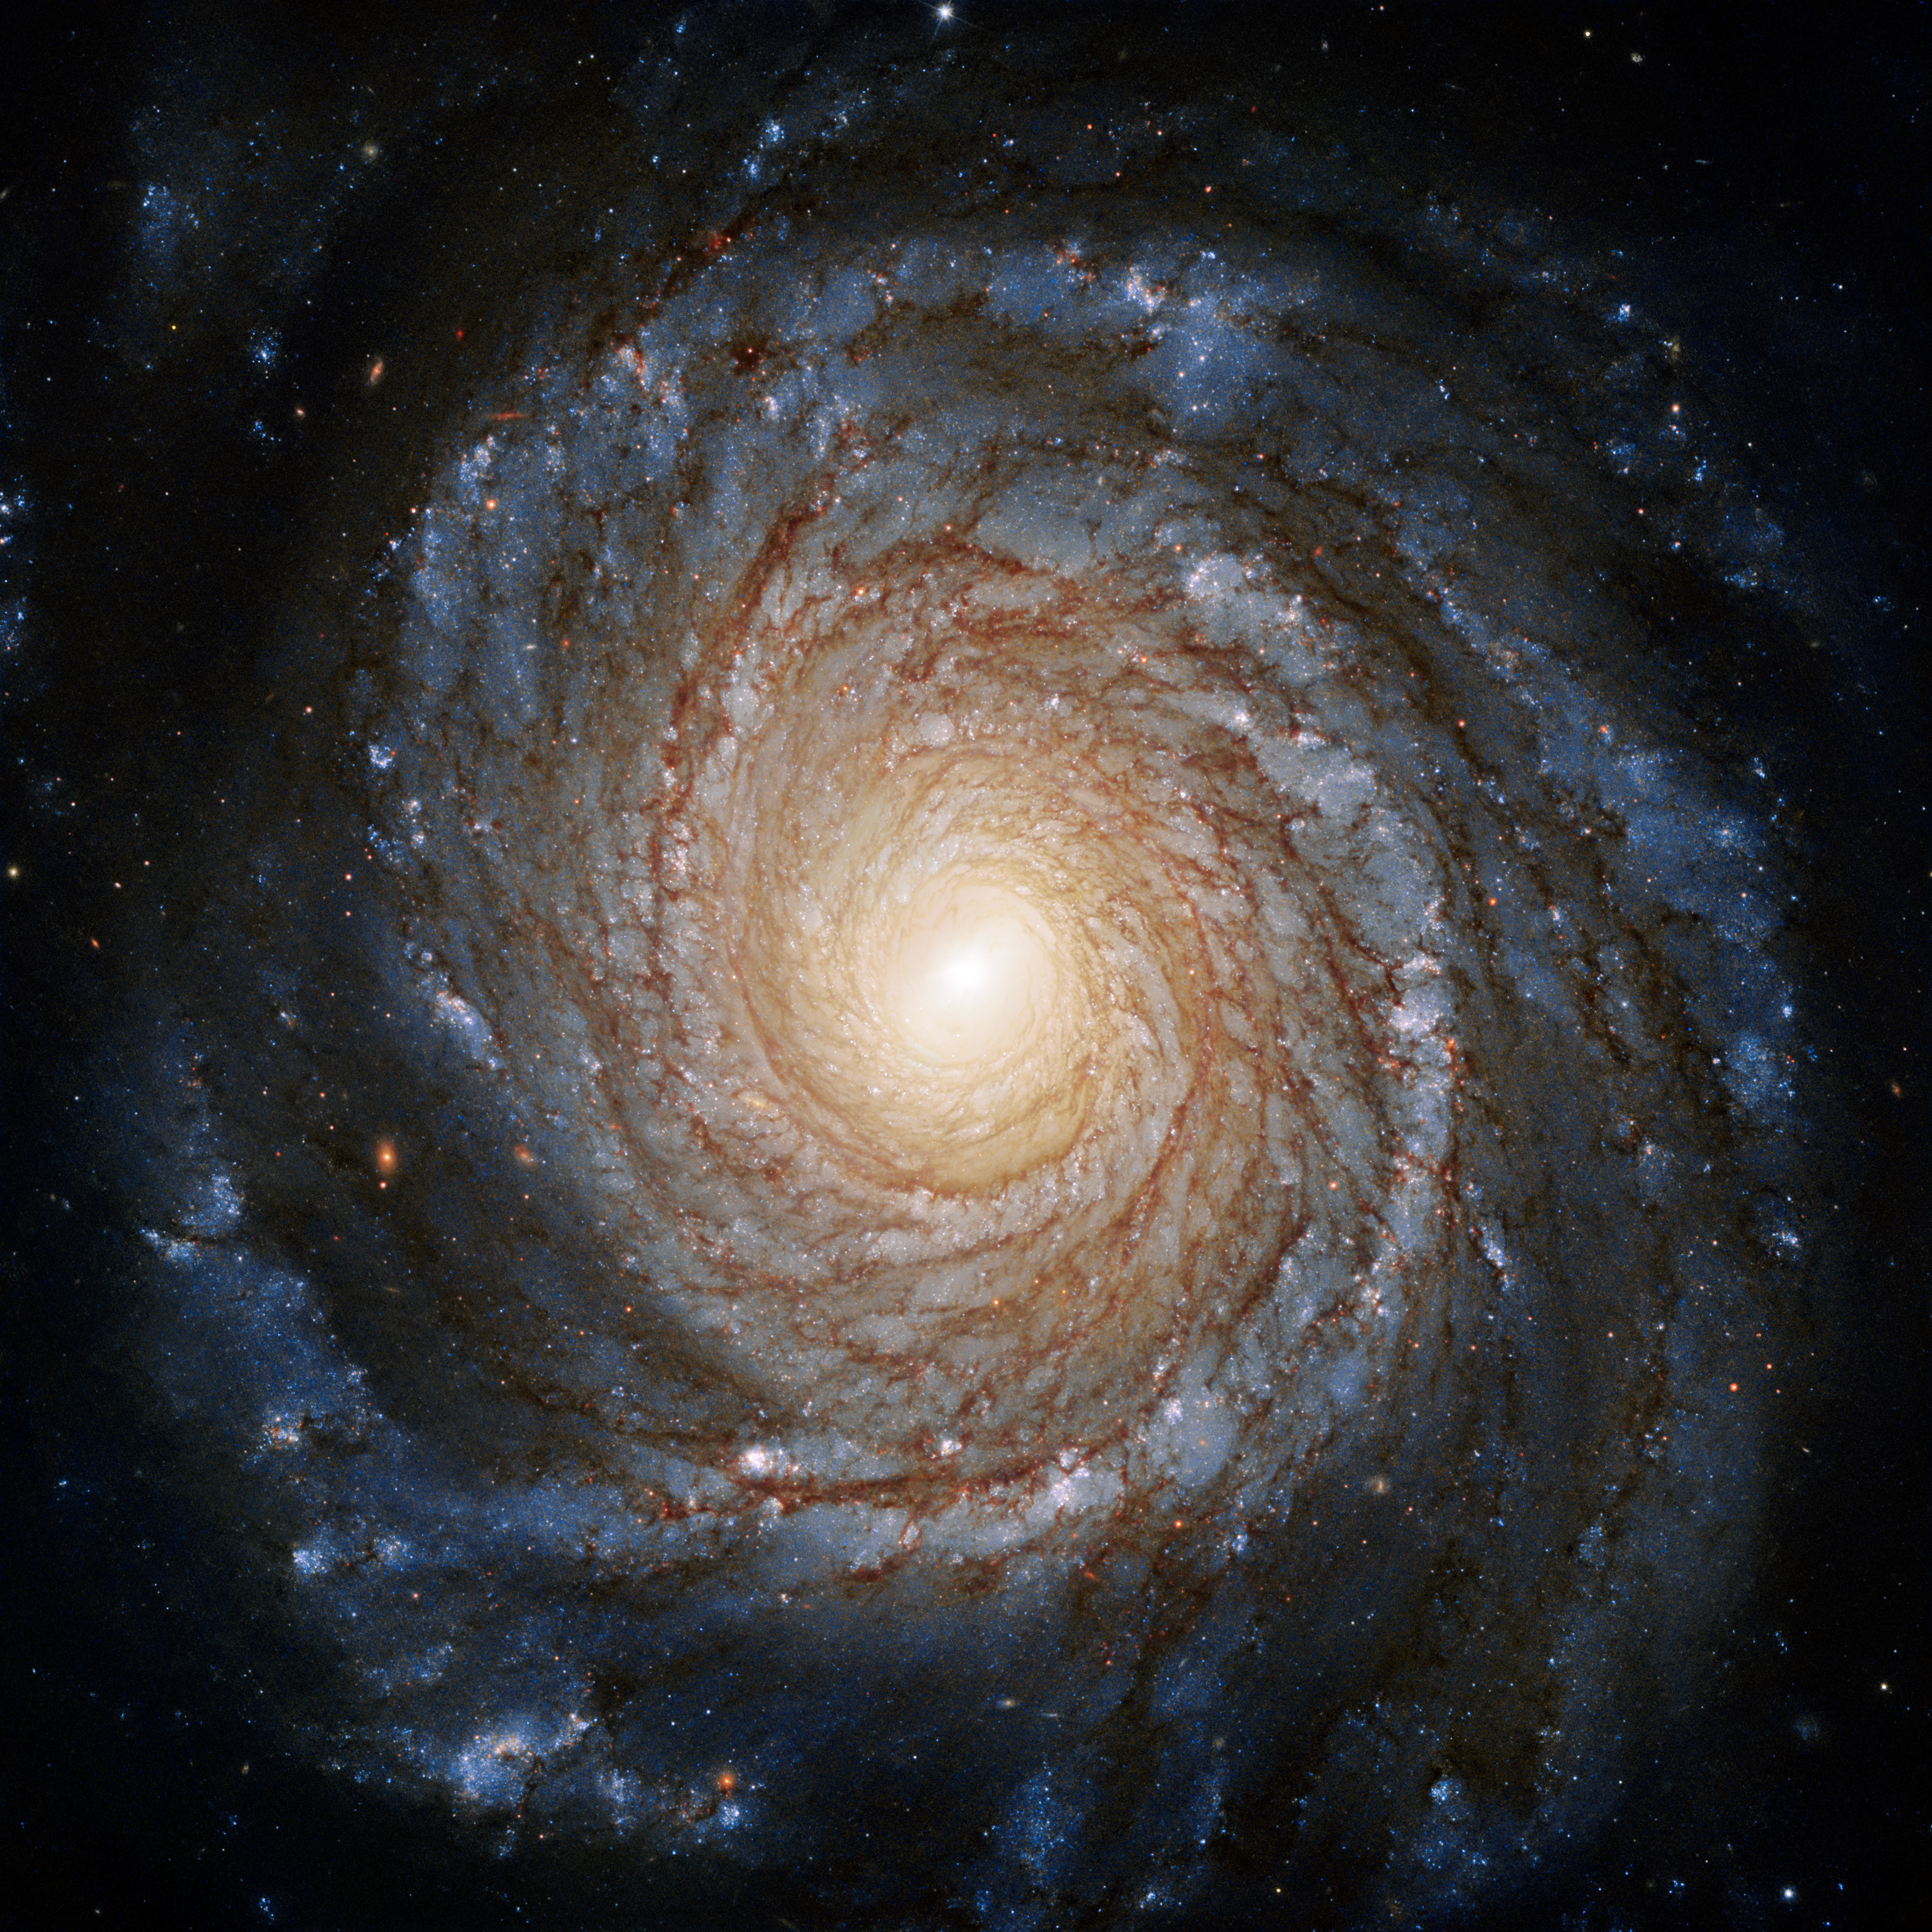

Galaxy NGC 3147

The shape and structure of this Spiral galaxy are plainly visible thanks to this perspective. Galaxy NGC 3147 galaxy is relatively close by, at a distance of roughly 130 million light-years, and can be found in the constellation of Draco (The Dragon).

Credit: ESA/Hubble & NASA, A. Riess et al.